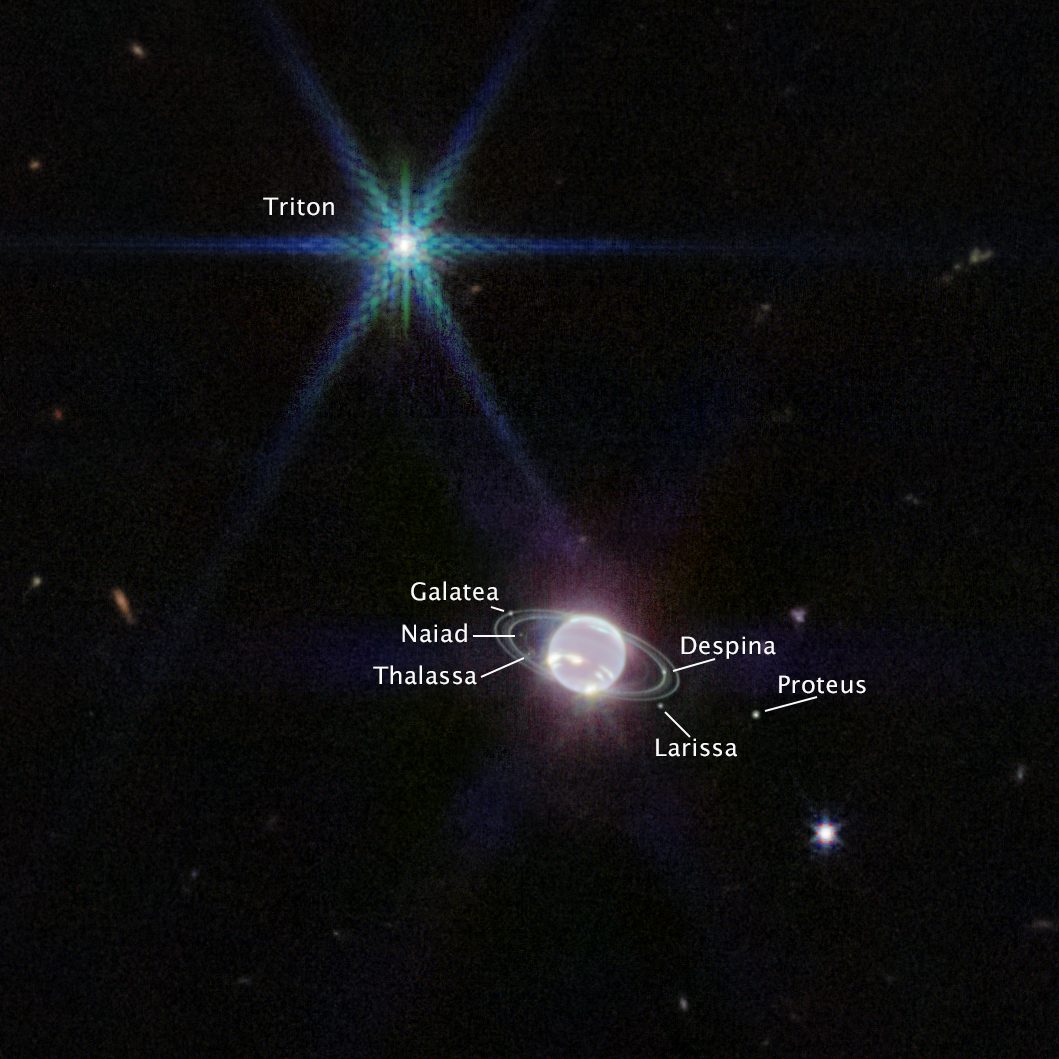

Neptune (NIRCam Image Annotated)

In this version of Webb’s Near-Infrared Camera (NIRCam) image of Neptune, the planet’s visible moons are labeled. Neptune has 14 known satellites, and seven of them are visible in this image.

Triton, the bright spot of light in the upper left of this image, far outshines Neptune because the planet’s atmosphere is darkened by methane absorption wavelengths captured by Webb. Triton reflects an average of 70 percent of the sunlight that hits it. Triton, which orbits Neptune in a backward orbit, is suspected to have originally been a Kuiper belt object that was gravitationally captured by Neptune.

Credit: NASA, ESA, CSA, and STScI